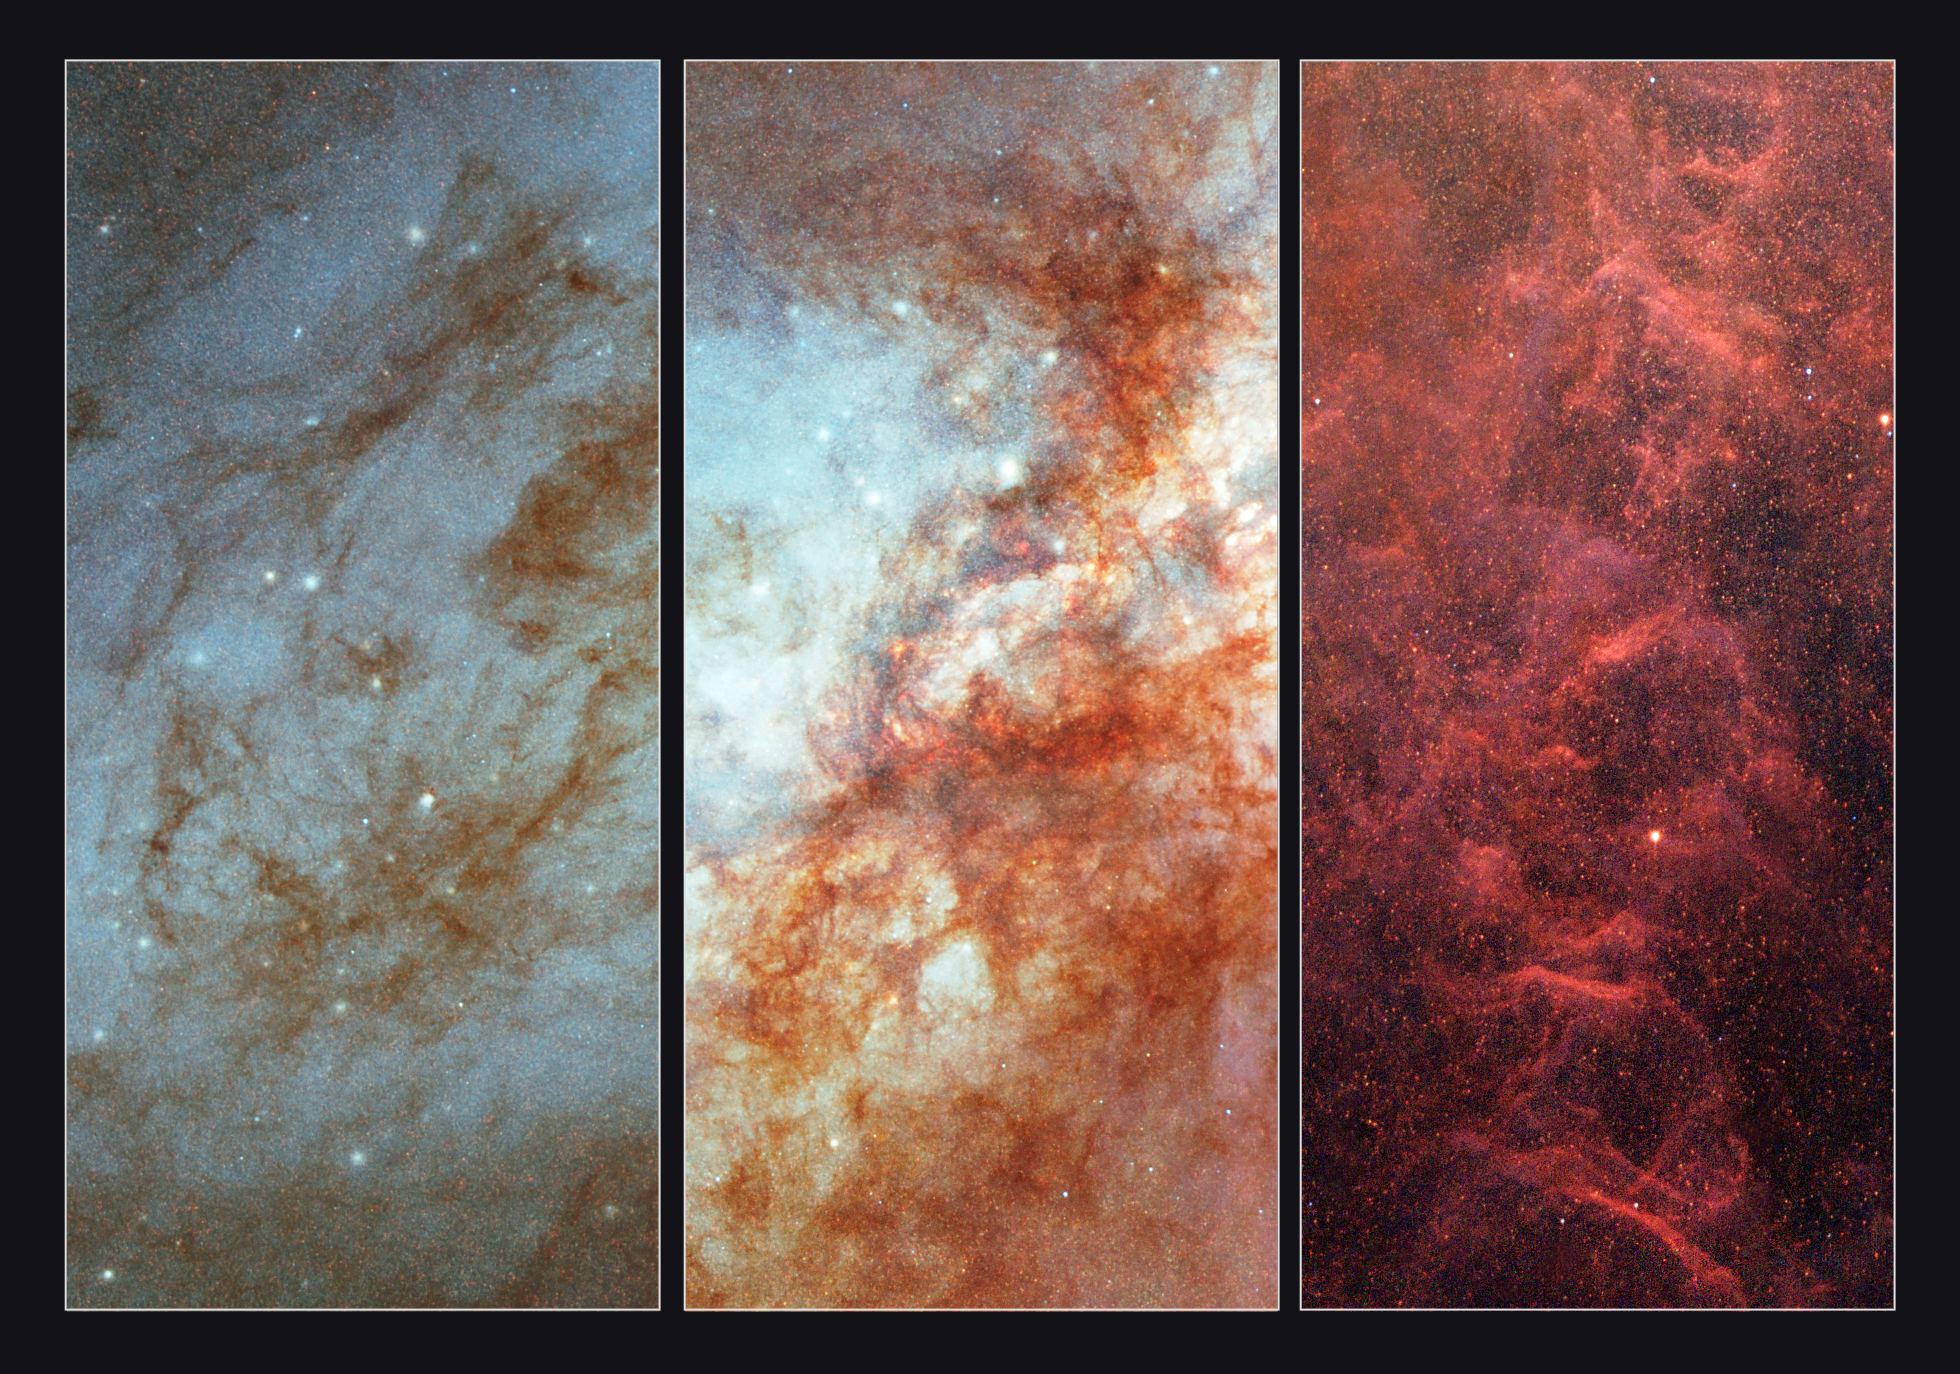

Details in Messier 82

Close-up of some of the most interesting parts of the Hubble Space Telescope image of the active galaxy Messier 82 (M82). Left: A portion of M82's bluish disk, largely composed of hot young stars. Numerous bright blue-white star-forming clumps and wisps of darker, cooler dust and gas appear superimposed on the disk. Centre: The central "inner-city" portion of the galaxy shows the combined light of countless stars and reveals numerous star-forming clumps, dark red clouds of gas and dust obscuring the light from the galaxy's core, and an overall field of fainter red (cooler) and blue (hotter) stars.

Credit: NASA, ESA and the Hubble Heritage Team (STScI/AURA). Acknowledgment: J. Gallagher (University of Wisconsin), M. Mountain (STScI) and P. Puxley (NSF).